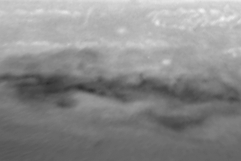

Evolution of D/G Impact Sites on Jupiter

The structure seen in earlier views has disappeared rapidly in the images taken on 30 July and 24 August, respectively. Almost all of the changes between the images are due to Jupiter's east-west winds that play a key role in the dispersing of the dark material.

Credit: H. Hammel, MIT and NASA/ESA